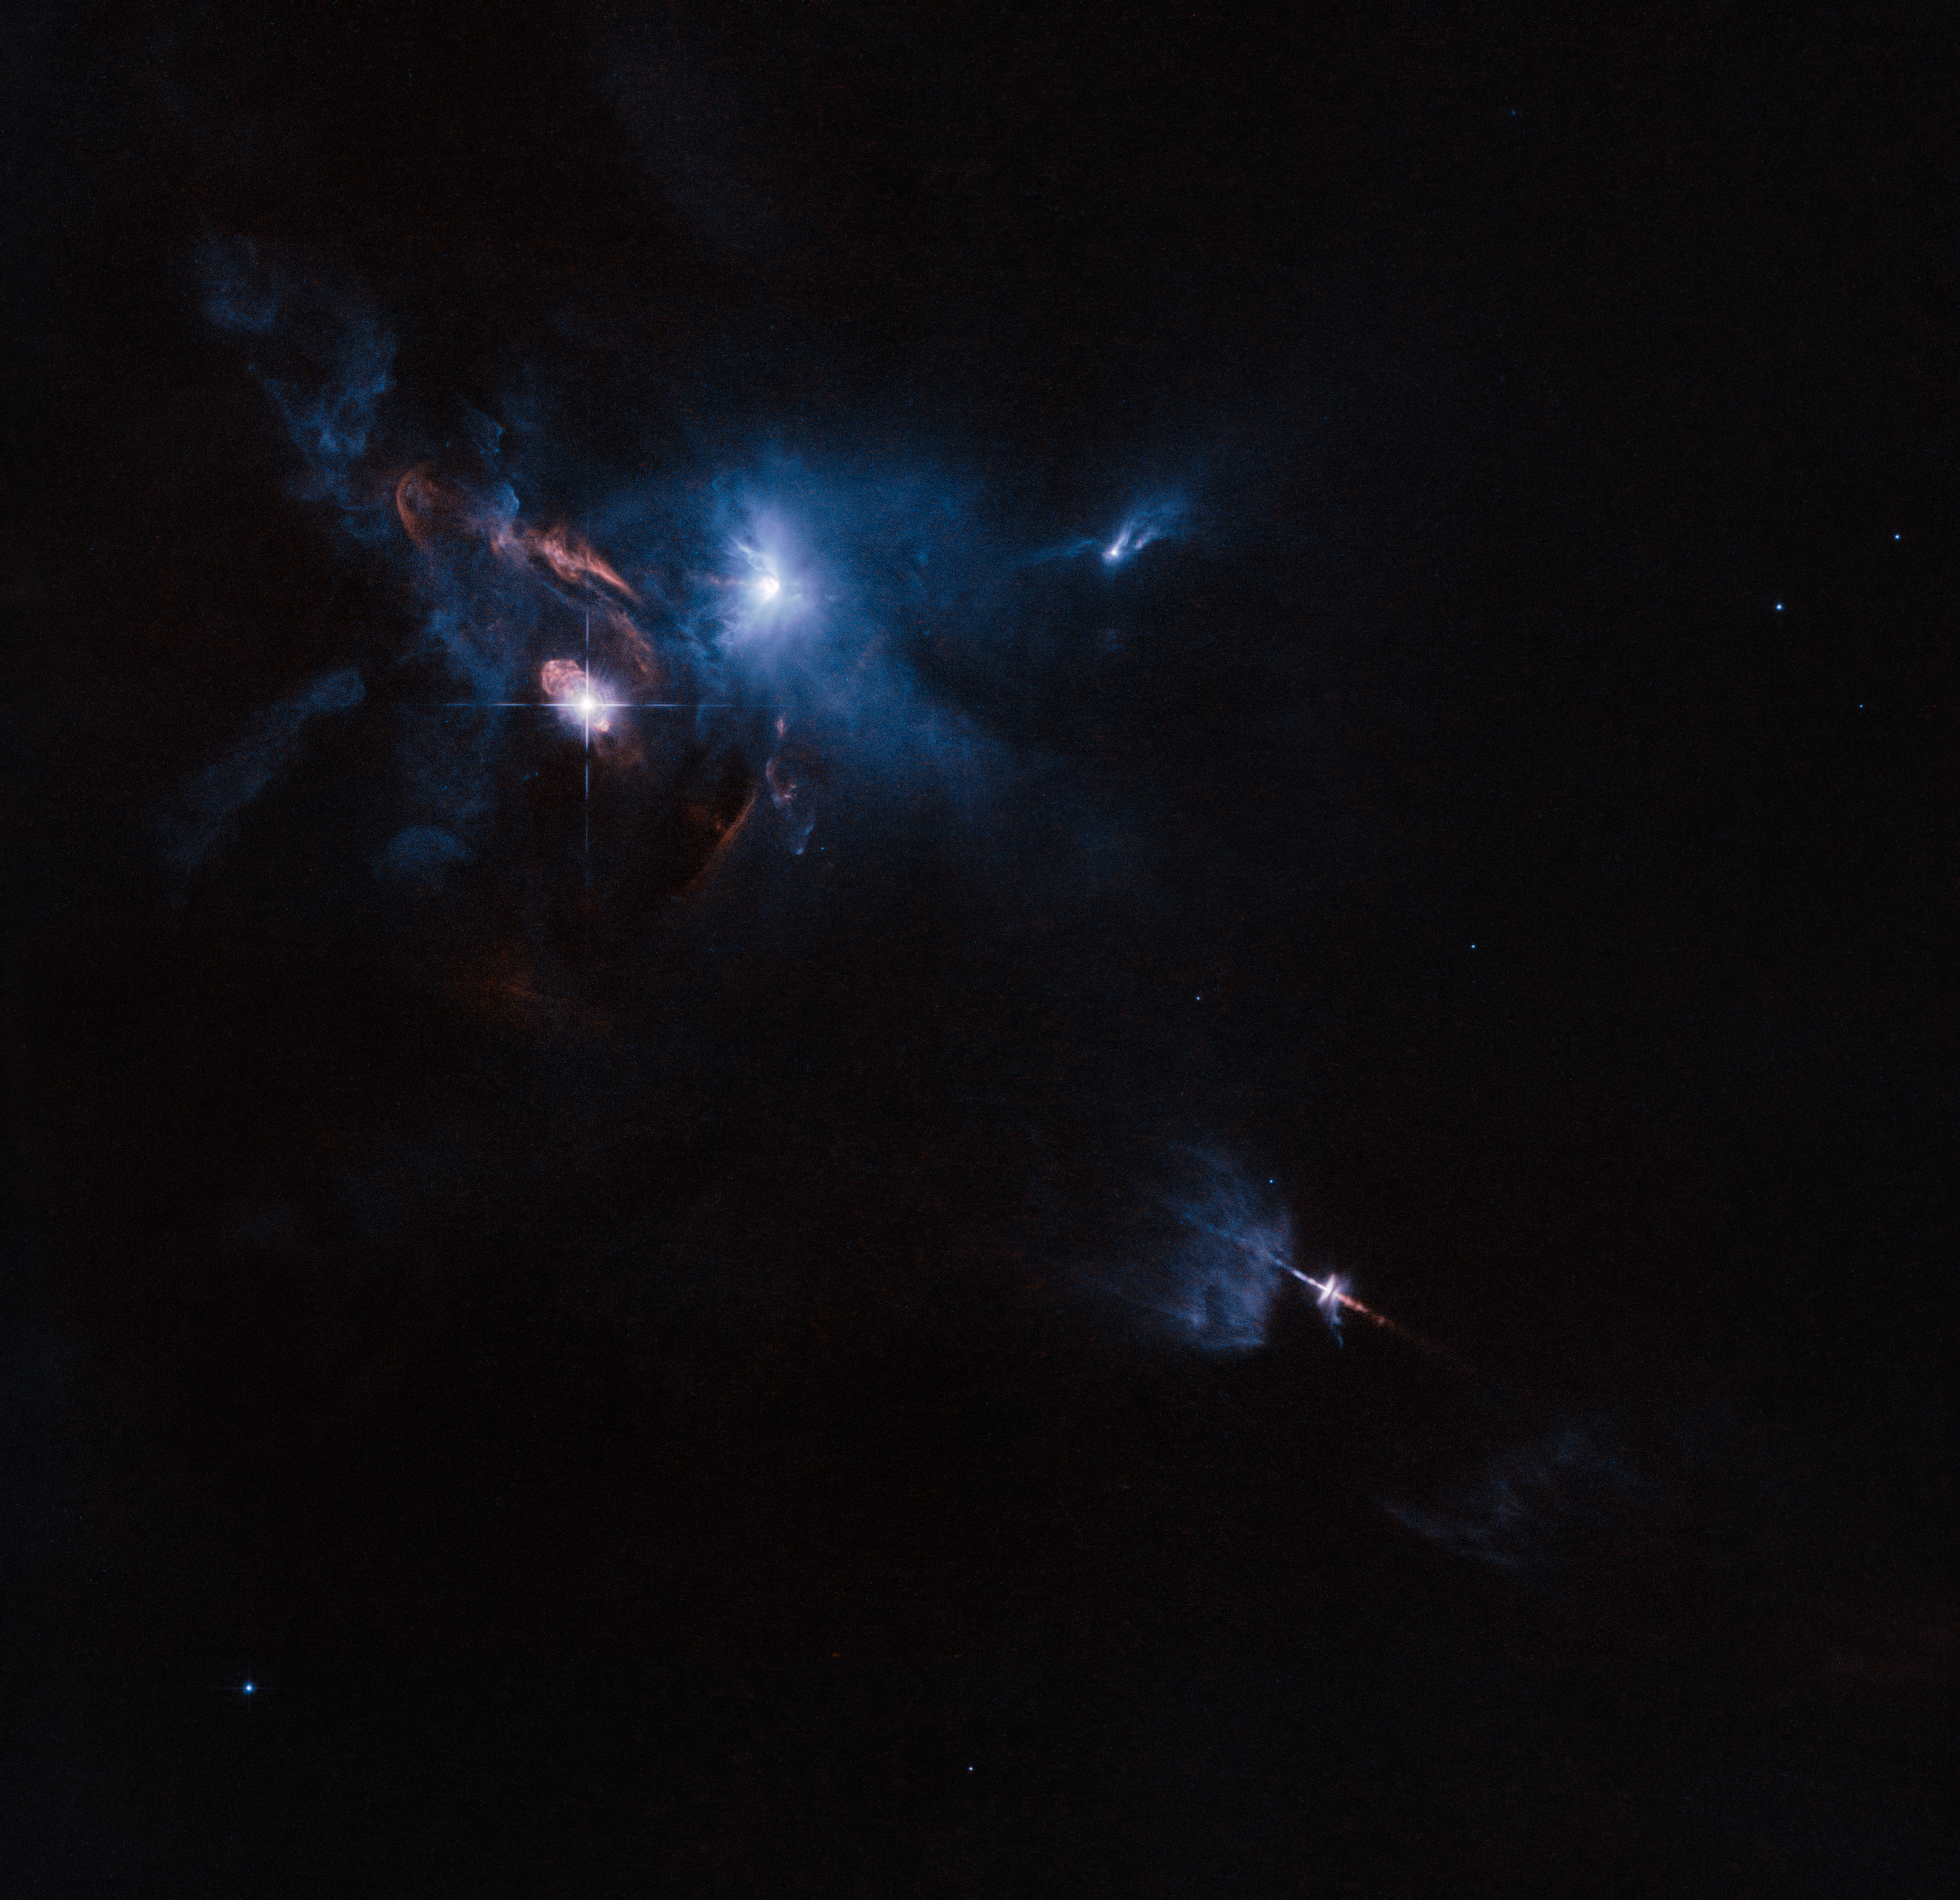

Jets, bubbles and bursts of light in Taurus

The NASA/ESA Hubble Space Telescope has snapped a striking view of a multiple star system called XZ Tauri, its neighbour HL Tauri and several nearby young stellar objects. XZ Tauri is blowing a hot bubble of gas into the surrounding space, which is filled with bright and beautiful clumps that are emitting strong winds and jets. These objects illuminate the region, creating a truly dramatic scene.

Credit: ESA/Hubble and NASA Acknowledgement: Judy Schmidt